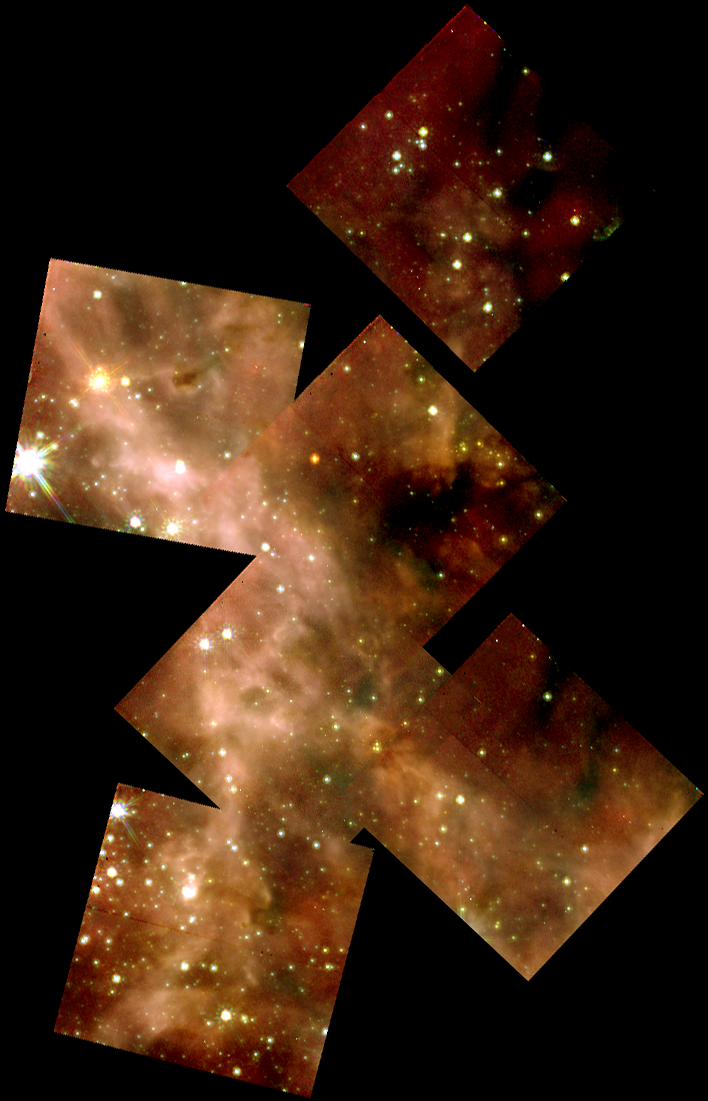

A Grand View of the Birth of 'Hefty' Stars - 30 Doradus Nebula Montage

This picture, taken in visible light with the Hubble Space Telescope's Wide Field and Planetary Camera 2(WFPC2), represents a sweeping view of the 30 Doradus Nebula. But Hubble's infrared camera - the Near Infrared Camera and Multi-Object Spectrometer (NICMOS) - has probed deeper into smaller regions of this nebula to unveil the stormy birth of massive stars. The montages of images in the upper left and upper right represent this deeper view. Each square in the montages is 15.5 light-years (19 arcseconds) across.

Credit: NASA/ESA/Nolan Walborn ( Space Telescope Science Institute, Baltimore, Md.) and Rodolfo Barba (La Plata Observatory, La Plata, Argentina)